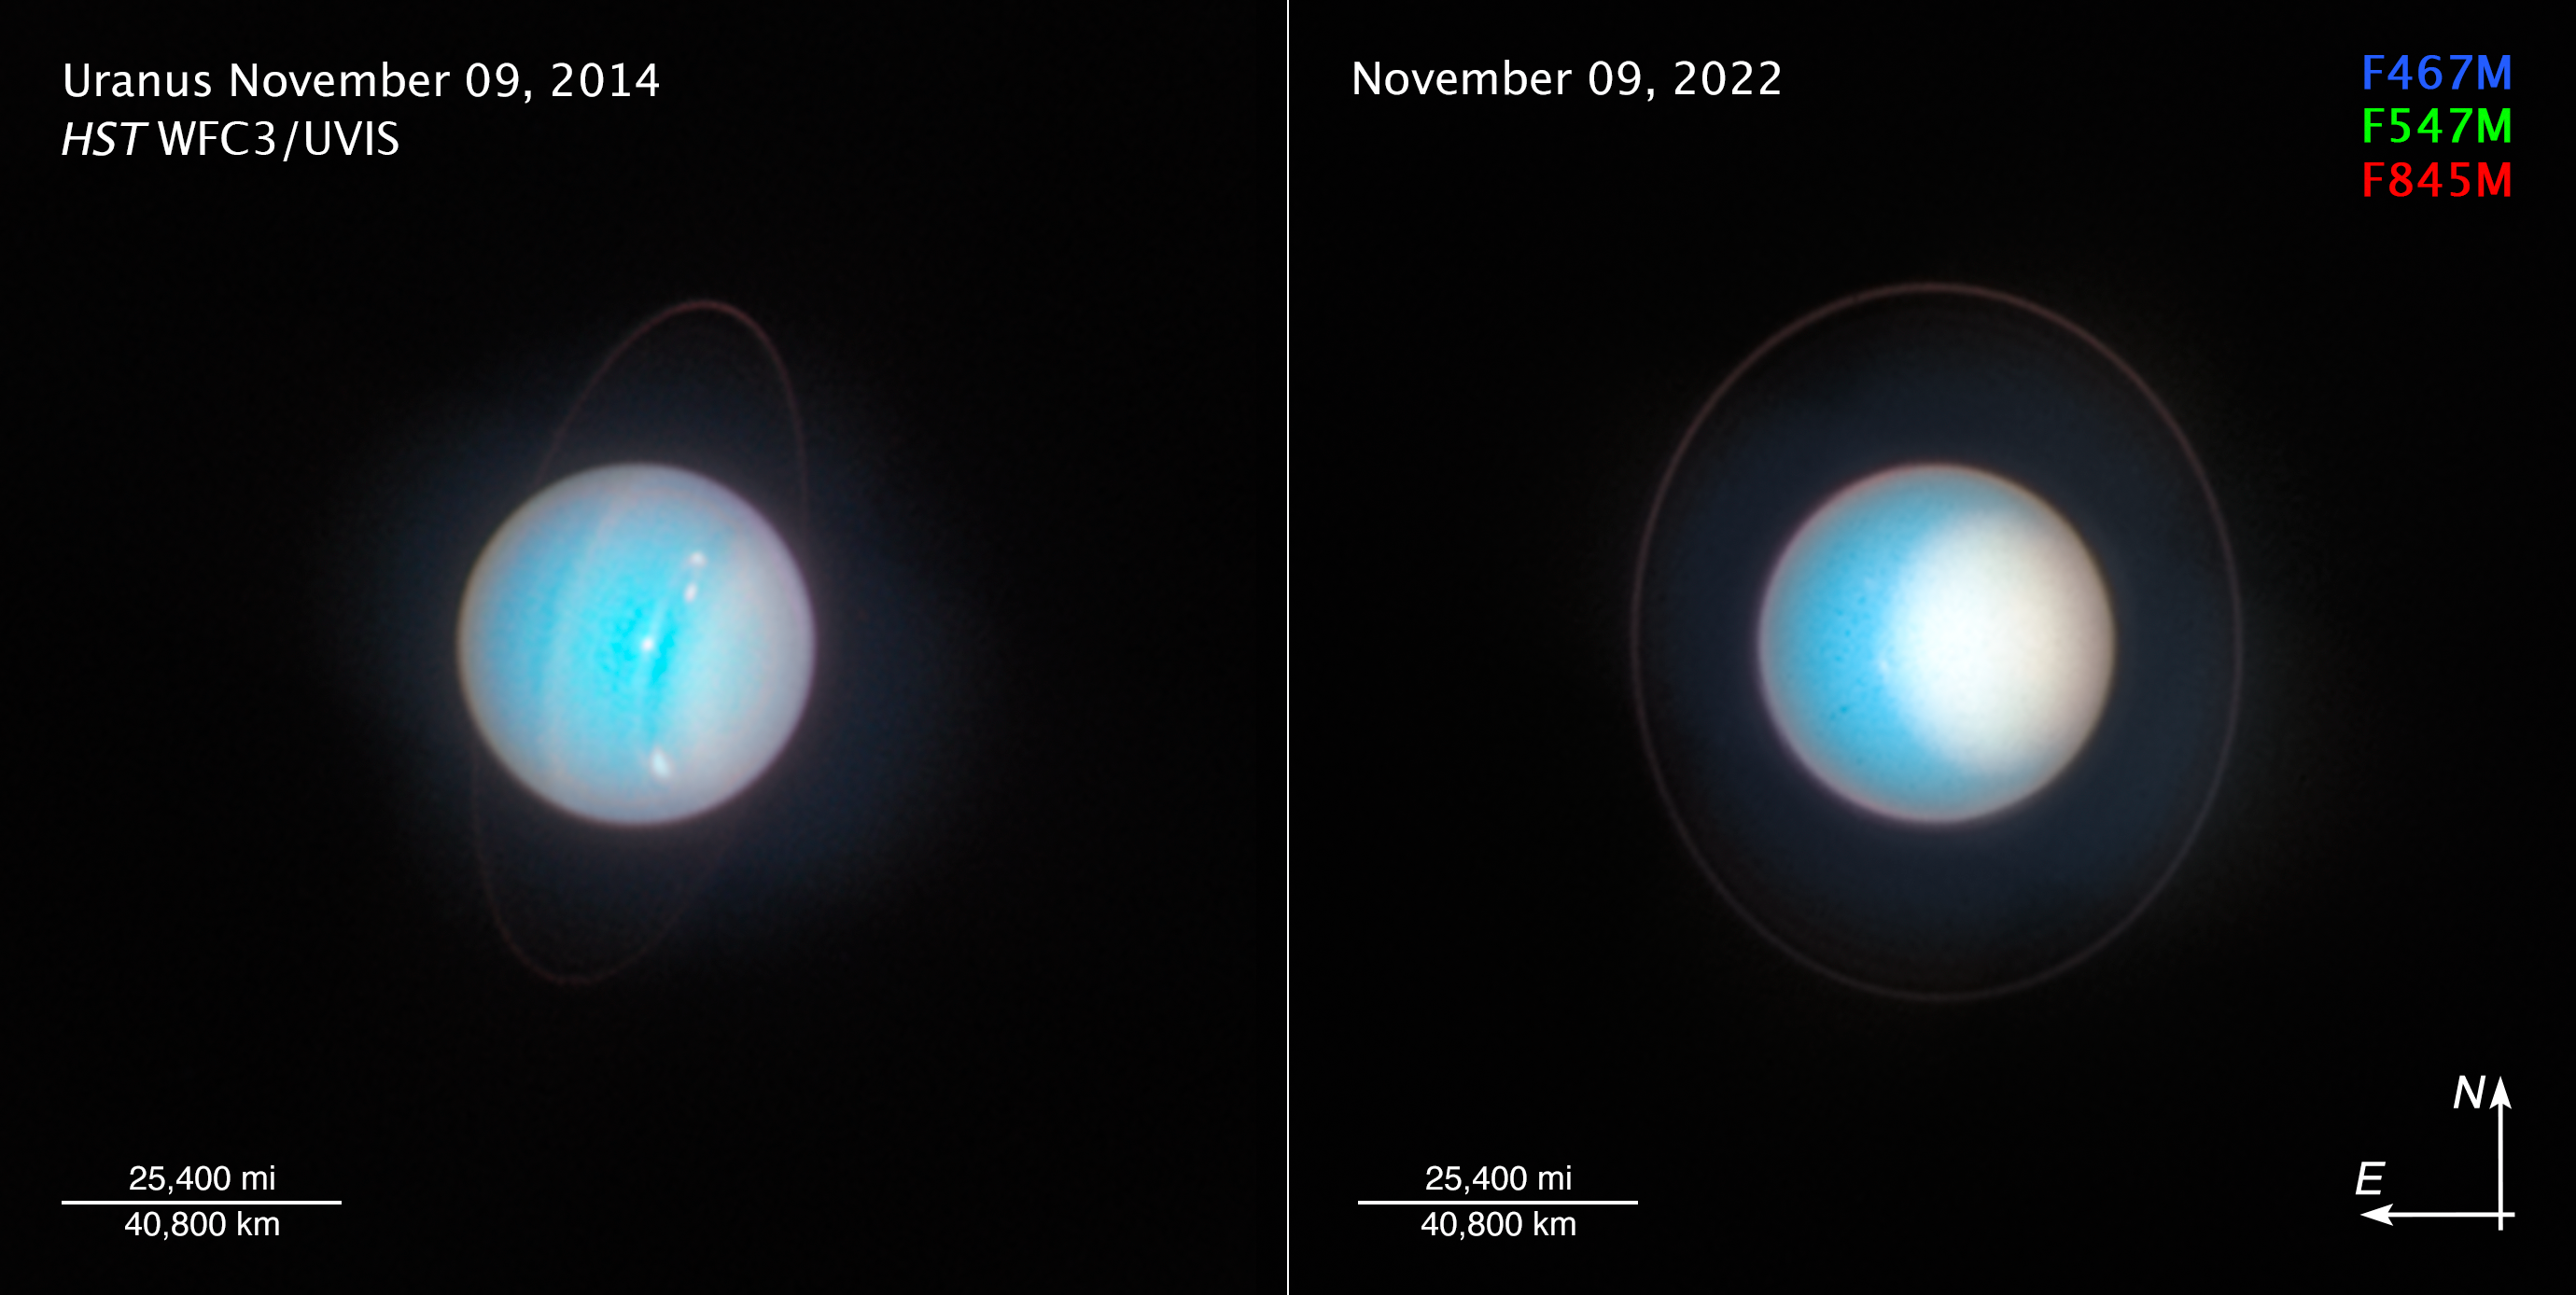

Uranus (November 2014 and November 2022) compass image

Planetary oddball Uranus rolls around the Sun on its side as it follows its 84-year orbit, rather than spinning in a more ’vertical’ position as Earth does. Its weirdly tilted ‘horizontal’ rotation axis is angled just eight degrees off the plane of the planet’s orbit. One recent theory proposes that Uranus once had a massive moon that gravitationally destabilised it and then crashed into it. Other possibilities include giant impacts during the formation of the planets, or even giant planets exerting resonant torques on each other over time. The consequences of Uranus’s tilt are that for stretches of time lasting up to 42 years, parts of one hemisphere are completely without sunlight. When the Voyager 2 spacecraft visited during the 1980s, the planet’s south pole was pointed almost directly at the Sun. Hubble’s latest view shows the northern pole now tipping toward the Sun.

[LEFT] - This is a Hubble view of Uranus taken in 2014, seven years after the northern spring equinox when the Sun was shining directly over the planet’s equator, and shows one of the first images from the OPAL programme. Multiple storms with methane ice-crystal clouds appear at mid-northern latitudes above the planet’s cyan-tinted lower atmosphere. Hubble photographed the ring system edge-on in 2007, but the rings are seen starting to open up seven years later in this view. At this time, the planet had multiple small storms and even some faint cloud bands.

[RIGHT] - As seen in 2022, Uranus’s north pole shows a thickened photochemical haze that looks similar to the smog over cities. Several little storms can be seen near the edge of the polar haze boundary. Hubble has been tracking the size and brightness of the north polar cap and it continues to get brighter year after year. Astronomers are disentangling multiple effects — from atmospheric circulation, particle properties, and chemical processes — that control how the atmospheric polar cap changes with the seasons. At the Uranian equinox in 2007, neither pole was particularly bright. As the northern summer solstice approaches in 2028 the cap may grow brighter still, and will be aimed directly toward Earth, allowing good views of the rings and the north pole; the ring system will then appear face-on. This image was taken on 10 November 2022.

Credit: NASA, ESA, STScI, A. Simon (NASA-GSFC), M. H. Wong (UC Berkeley), J. DePasquale (STScI)